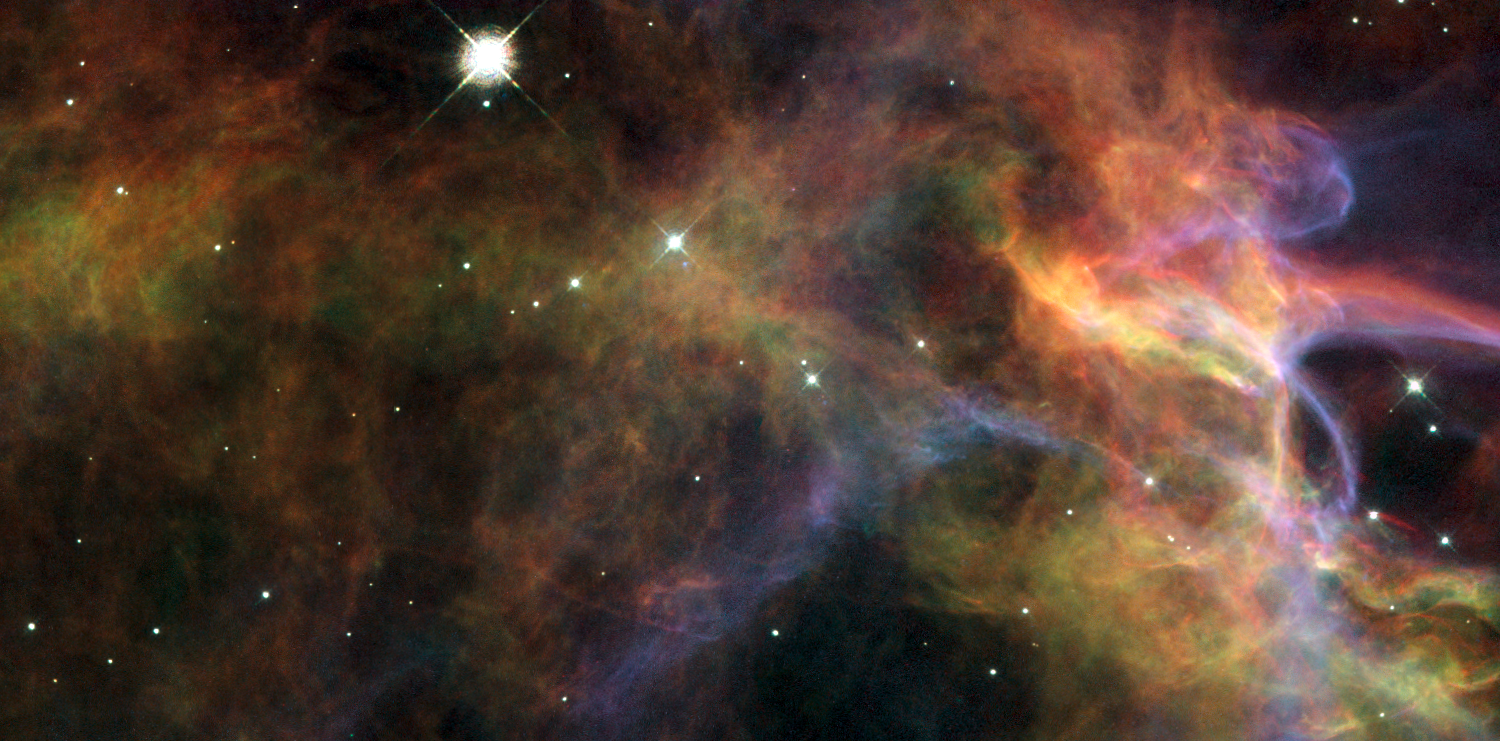

Uncovering the Veil Nebula

This image is a stunning close-up of the Veil Nebula - the shattered remains of a supernova that exploded some 5-10,000 years ago. The image provides a beautiful view of the delicate, wispy structure resulting from this cosmic explosion. Also known as Cygnus Loop, the Veil Nebula is located in the constellation of Cygnus, the Swan, and is about 1,500 light-years away from Earth.

This small portion of the Veil Nebula is located in the larger segment seen in its western part (the top left corner of the large ground-based overview image). The entire structure spans about 3 degrees, corresponding to about 6 full moons.

The image was taken with Hubble's Wide Field and Planetary Camera 2 (WFPC2). The colour is produced by composite of three different images. The different colours indicate emission from different kinds of atoms excited by the shock: blue shows oxygen, green shows sulphur, and red shows hydrogen.

Credit: NASA, ESA, and the Hubble Heritage (STScI/AURA)-ESA/Hubble Collaboration. Acknowledgment: J. Hester (Arizona State University)